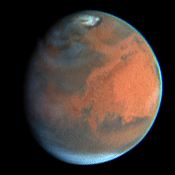

Rapid Weather Change Observed on Mars

NASA/ESA Hubble Space Telescope images of Mars obtained on July 11, 1997.

Credit: Steve Lee (Univ. Colorado), Phil James (Univ. Toledo), and Todd Clancy (Space Science Inst.)